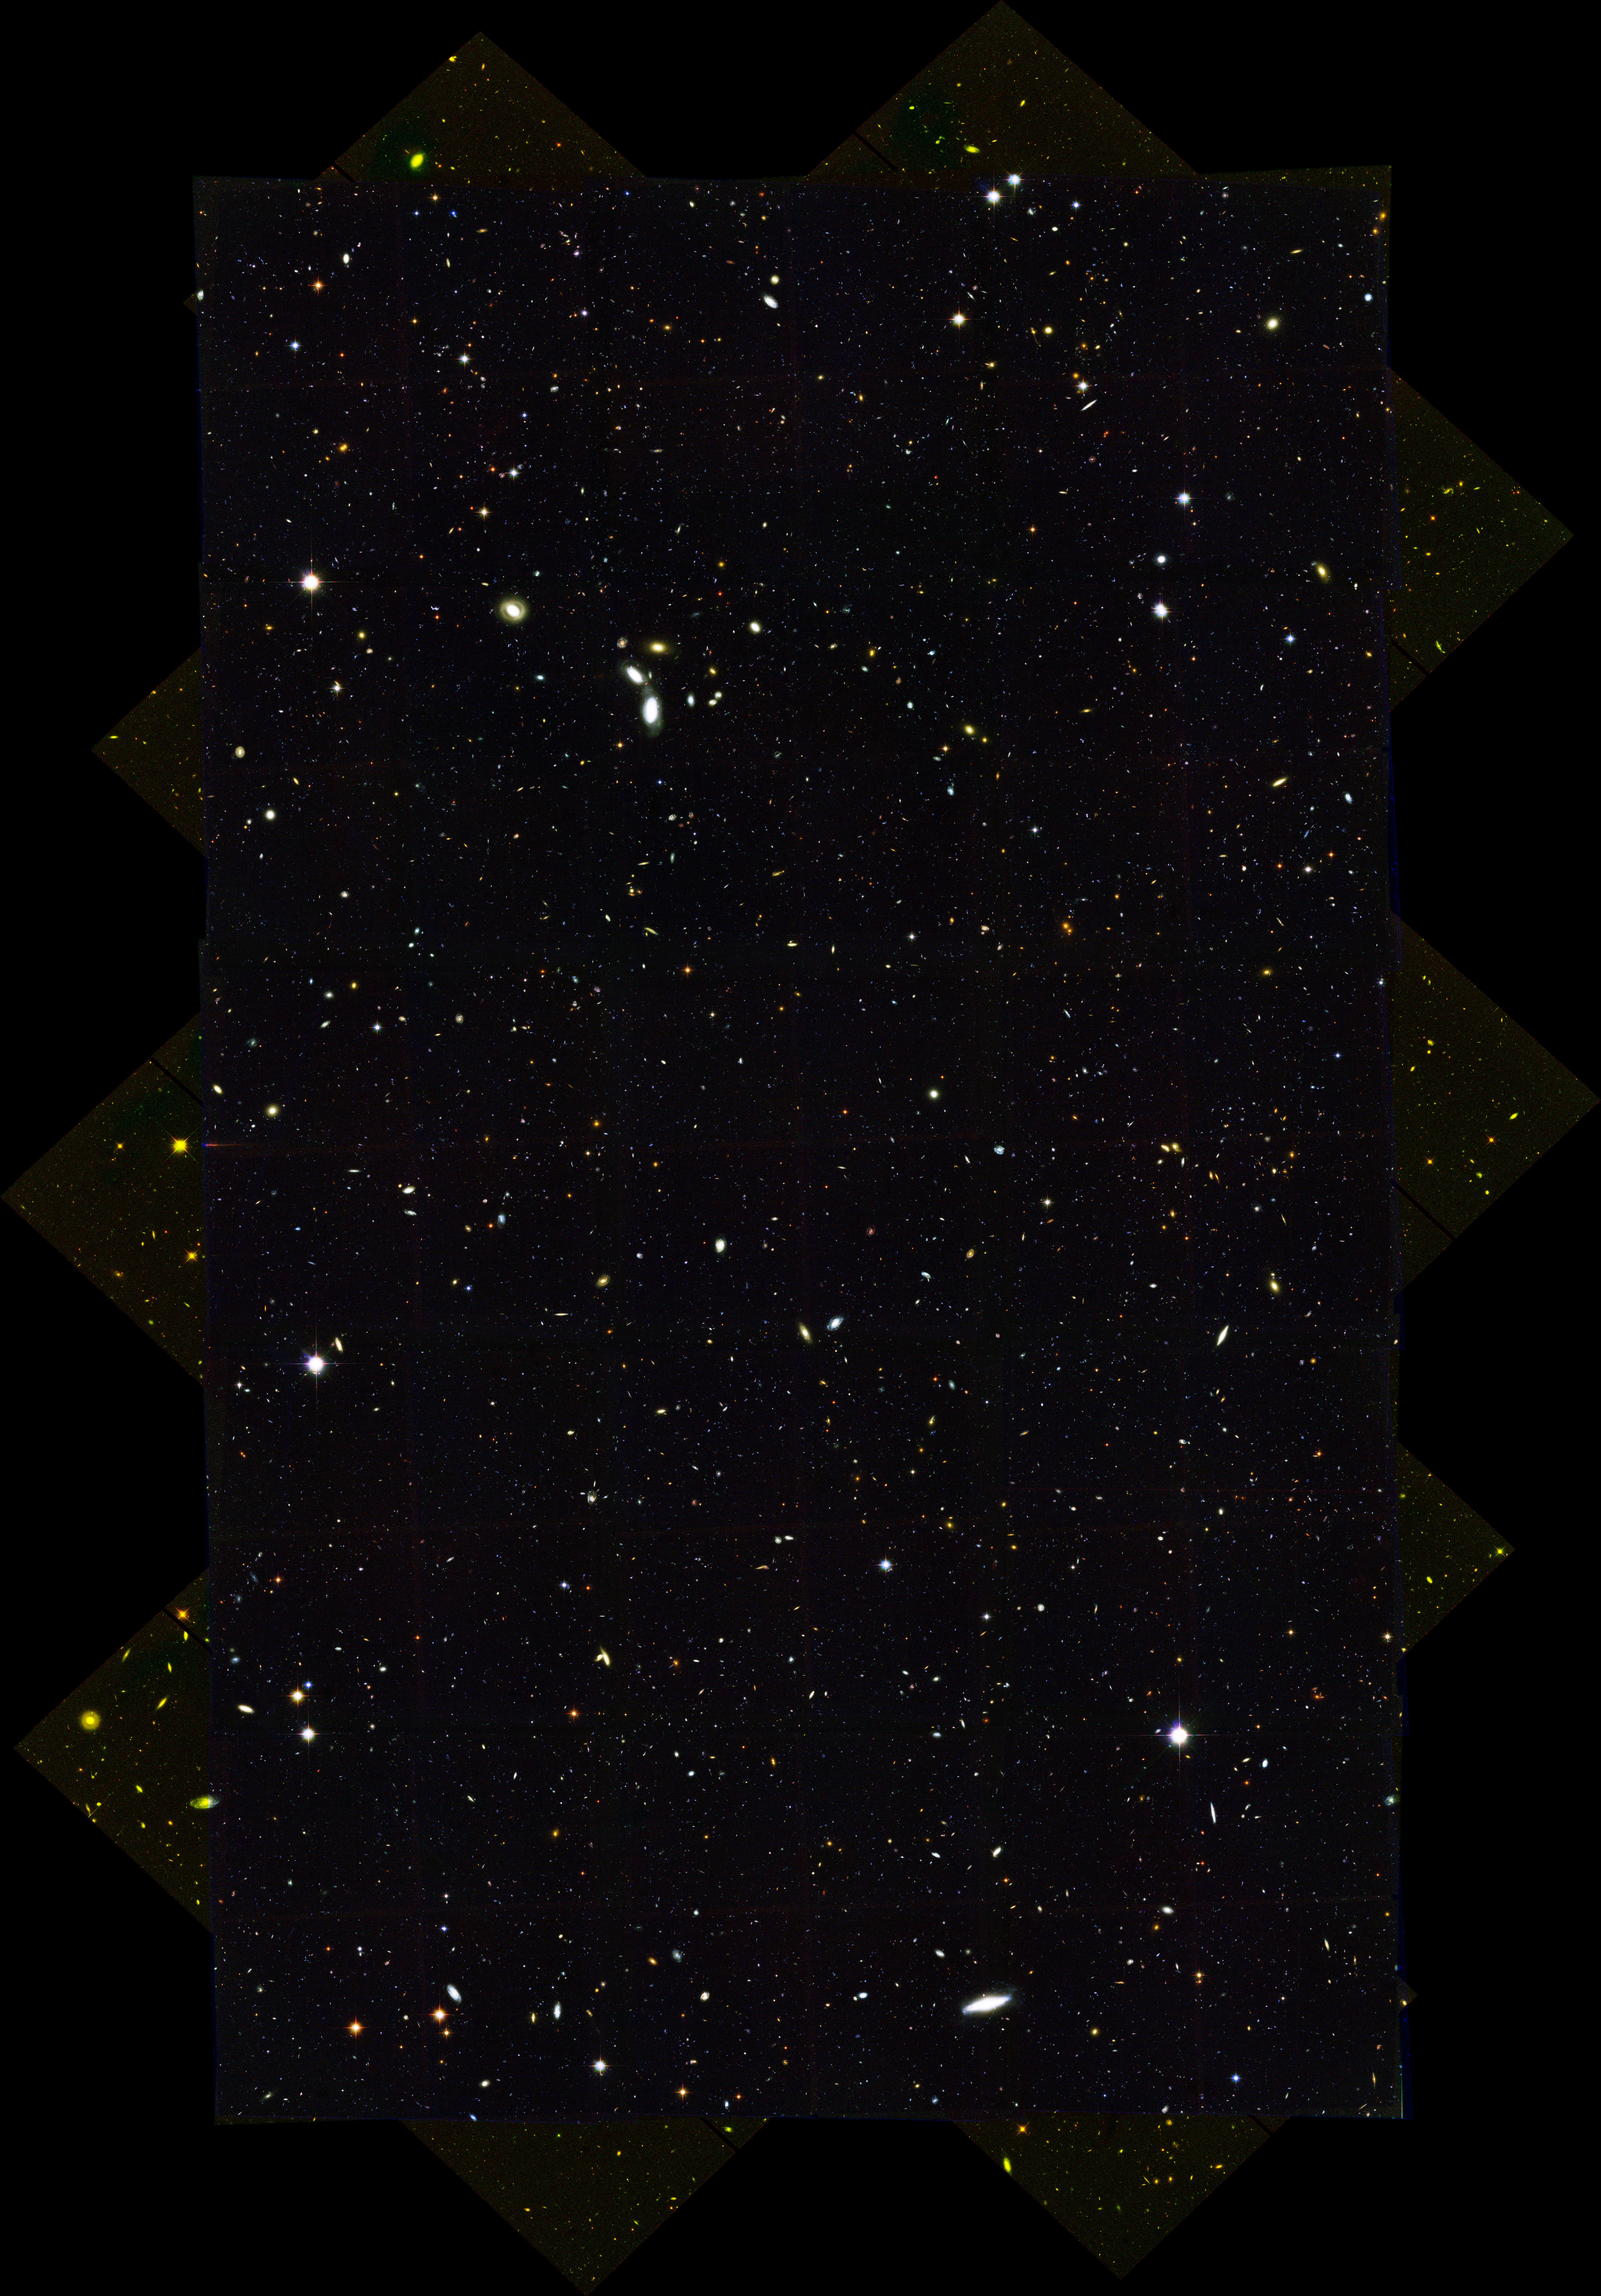

CDF-S HST/ACS/WFC Full Mosaic

Full mosaic of the Chandra Deep Field South.

Credit: NASA, ESA, the GOODS Team and M. Giavalisco (STScI)